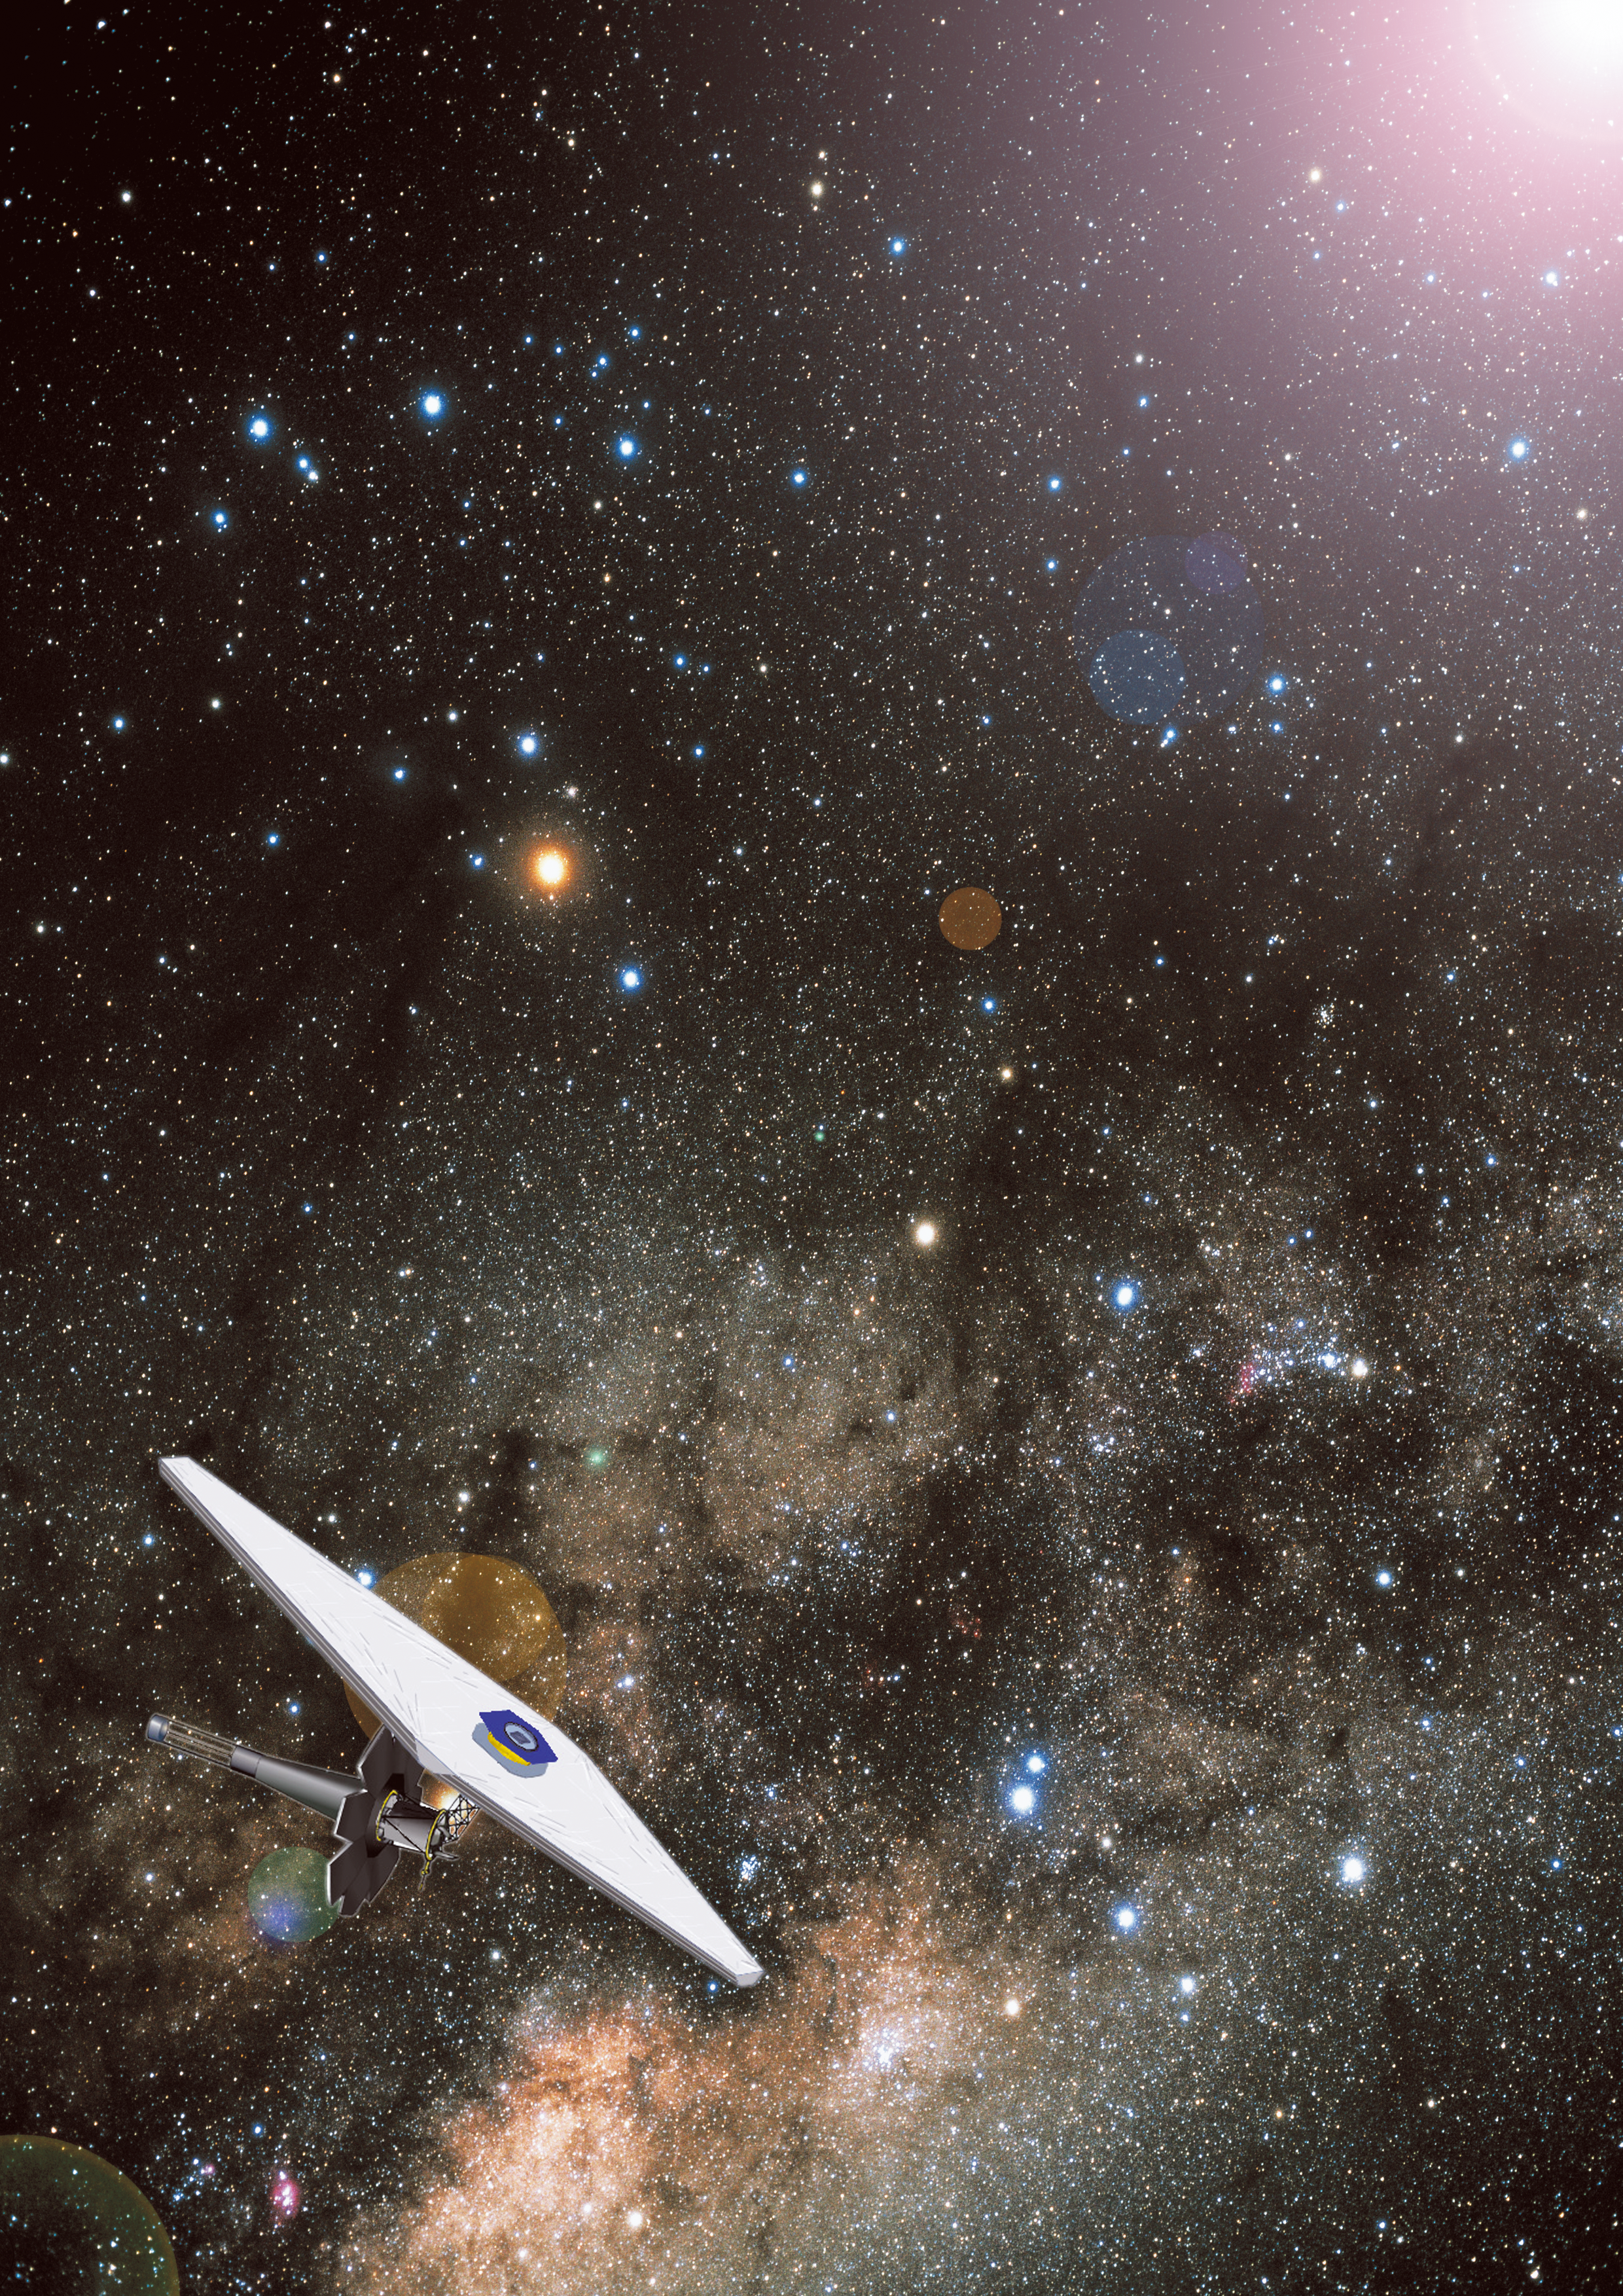

The James Webb Space Telescope (artist's impression)

The James Webb Space Telescope observing the cosmos.

Credit: ESA